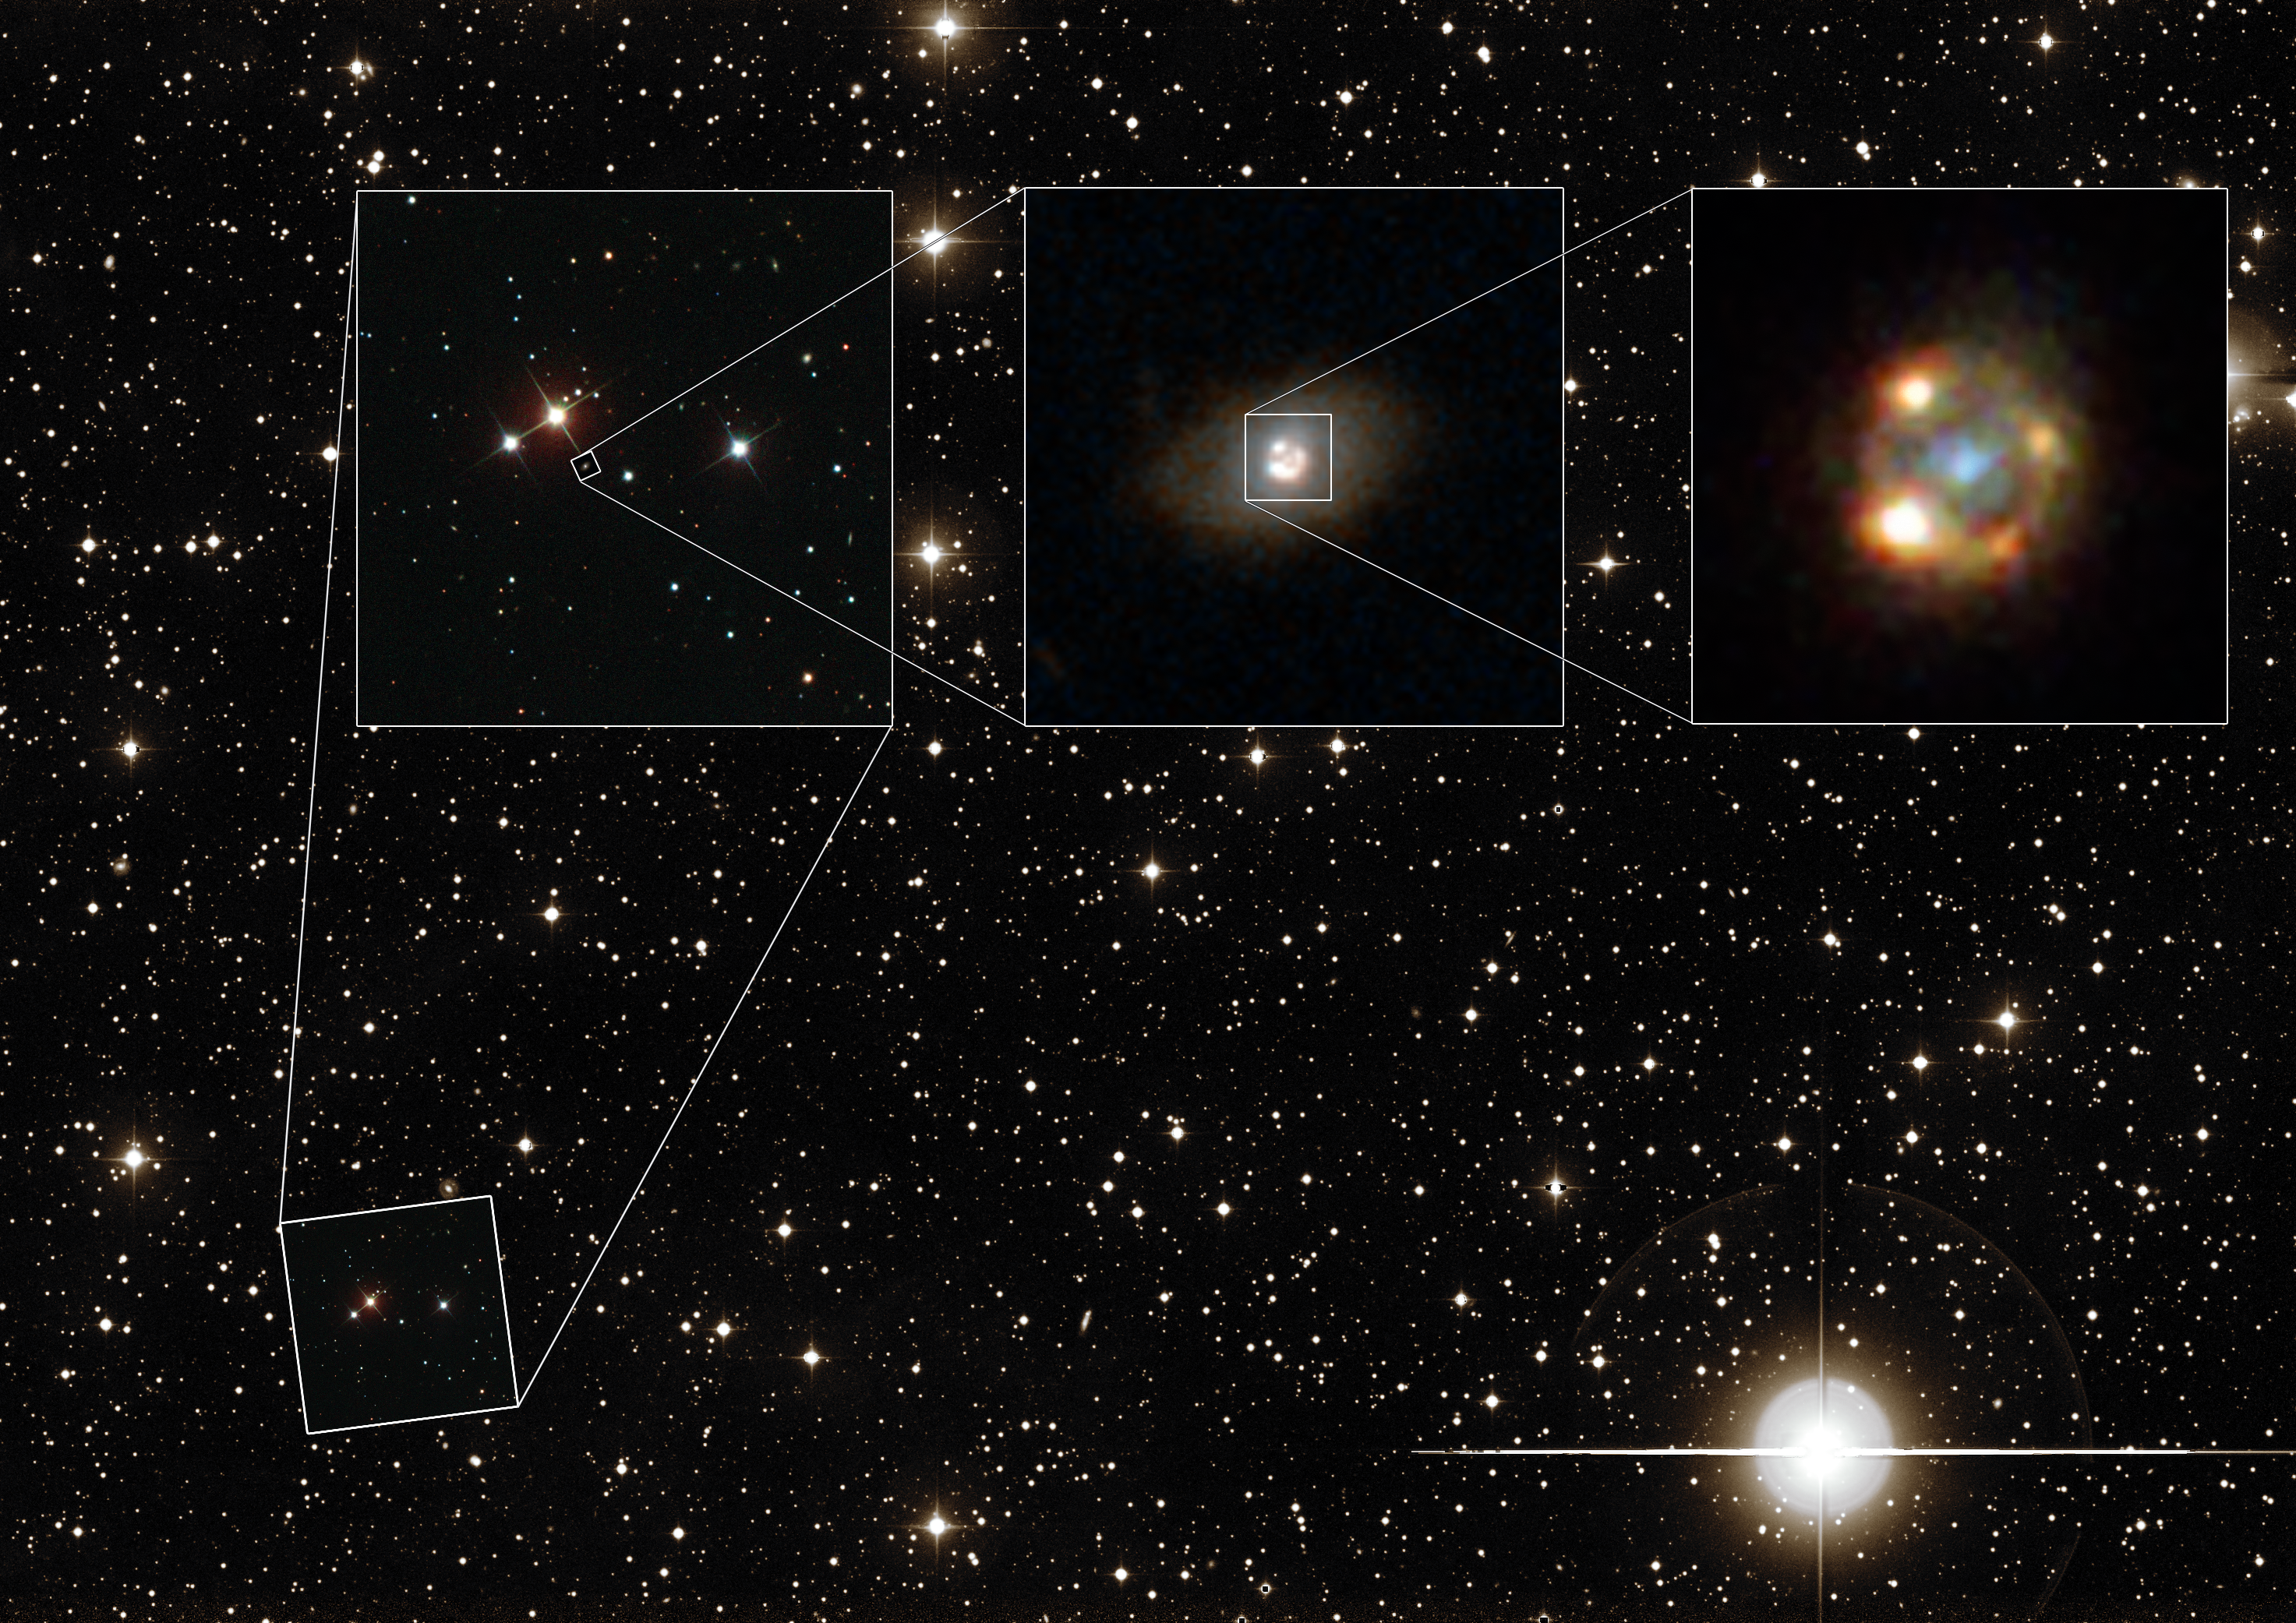

Detailed look at a gravitationally lensed supernova

This composite image shows the gravitationally lensed type Ia supernova iPTF16geu, as seen with different telescopes. The background image shows a wide-field view of the night sky as seen with the Palomar Observatory located on Palomar Mountain, California. The leftmost image shows observations made with the Sloan Digital Sky Survey (SDSS). The central image was taken by the NASA/ESA Hubble Space Telescope and shows the lensing galaxy SDSS J210415.89-062024.7. The rightmost image was also taken with Hubble and depicts the four lensed images of the supernova explosion, surrounding the lensing galaxy.

Credit: ESA/Hubble, NASA, Sloan Digital Sky Survey, Palomar Observatory/California Institute of Technology